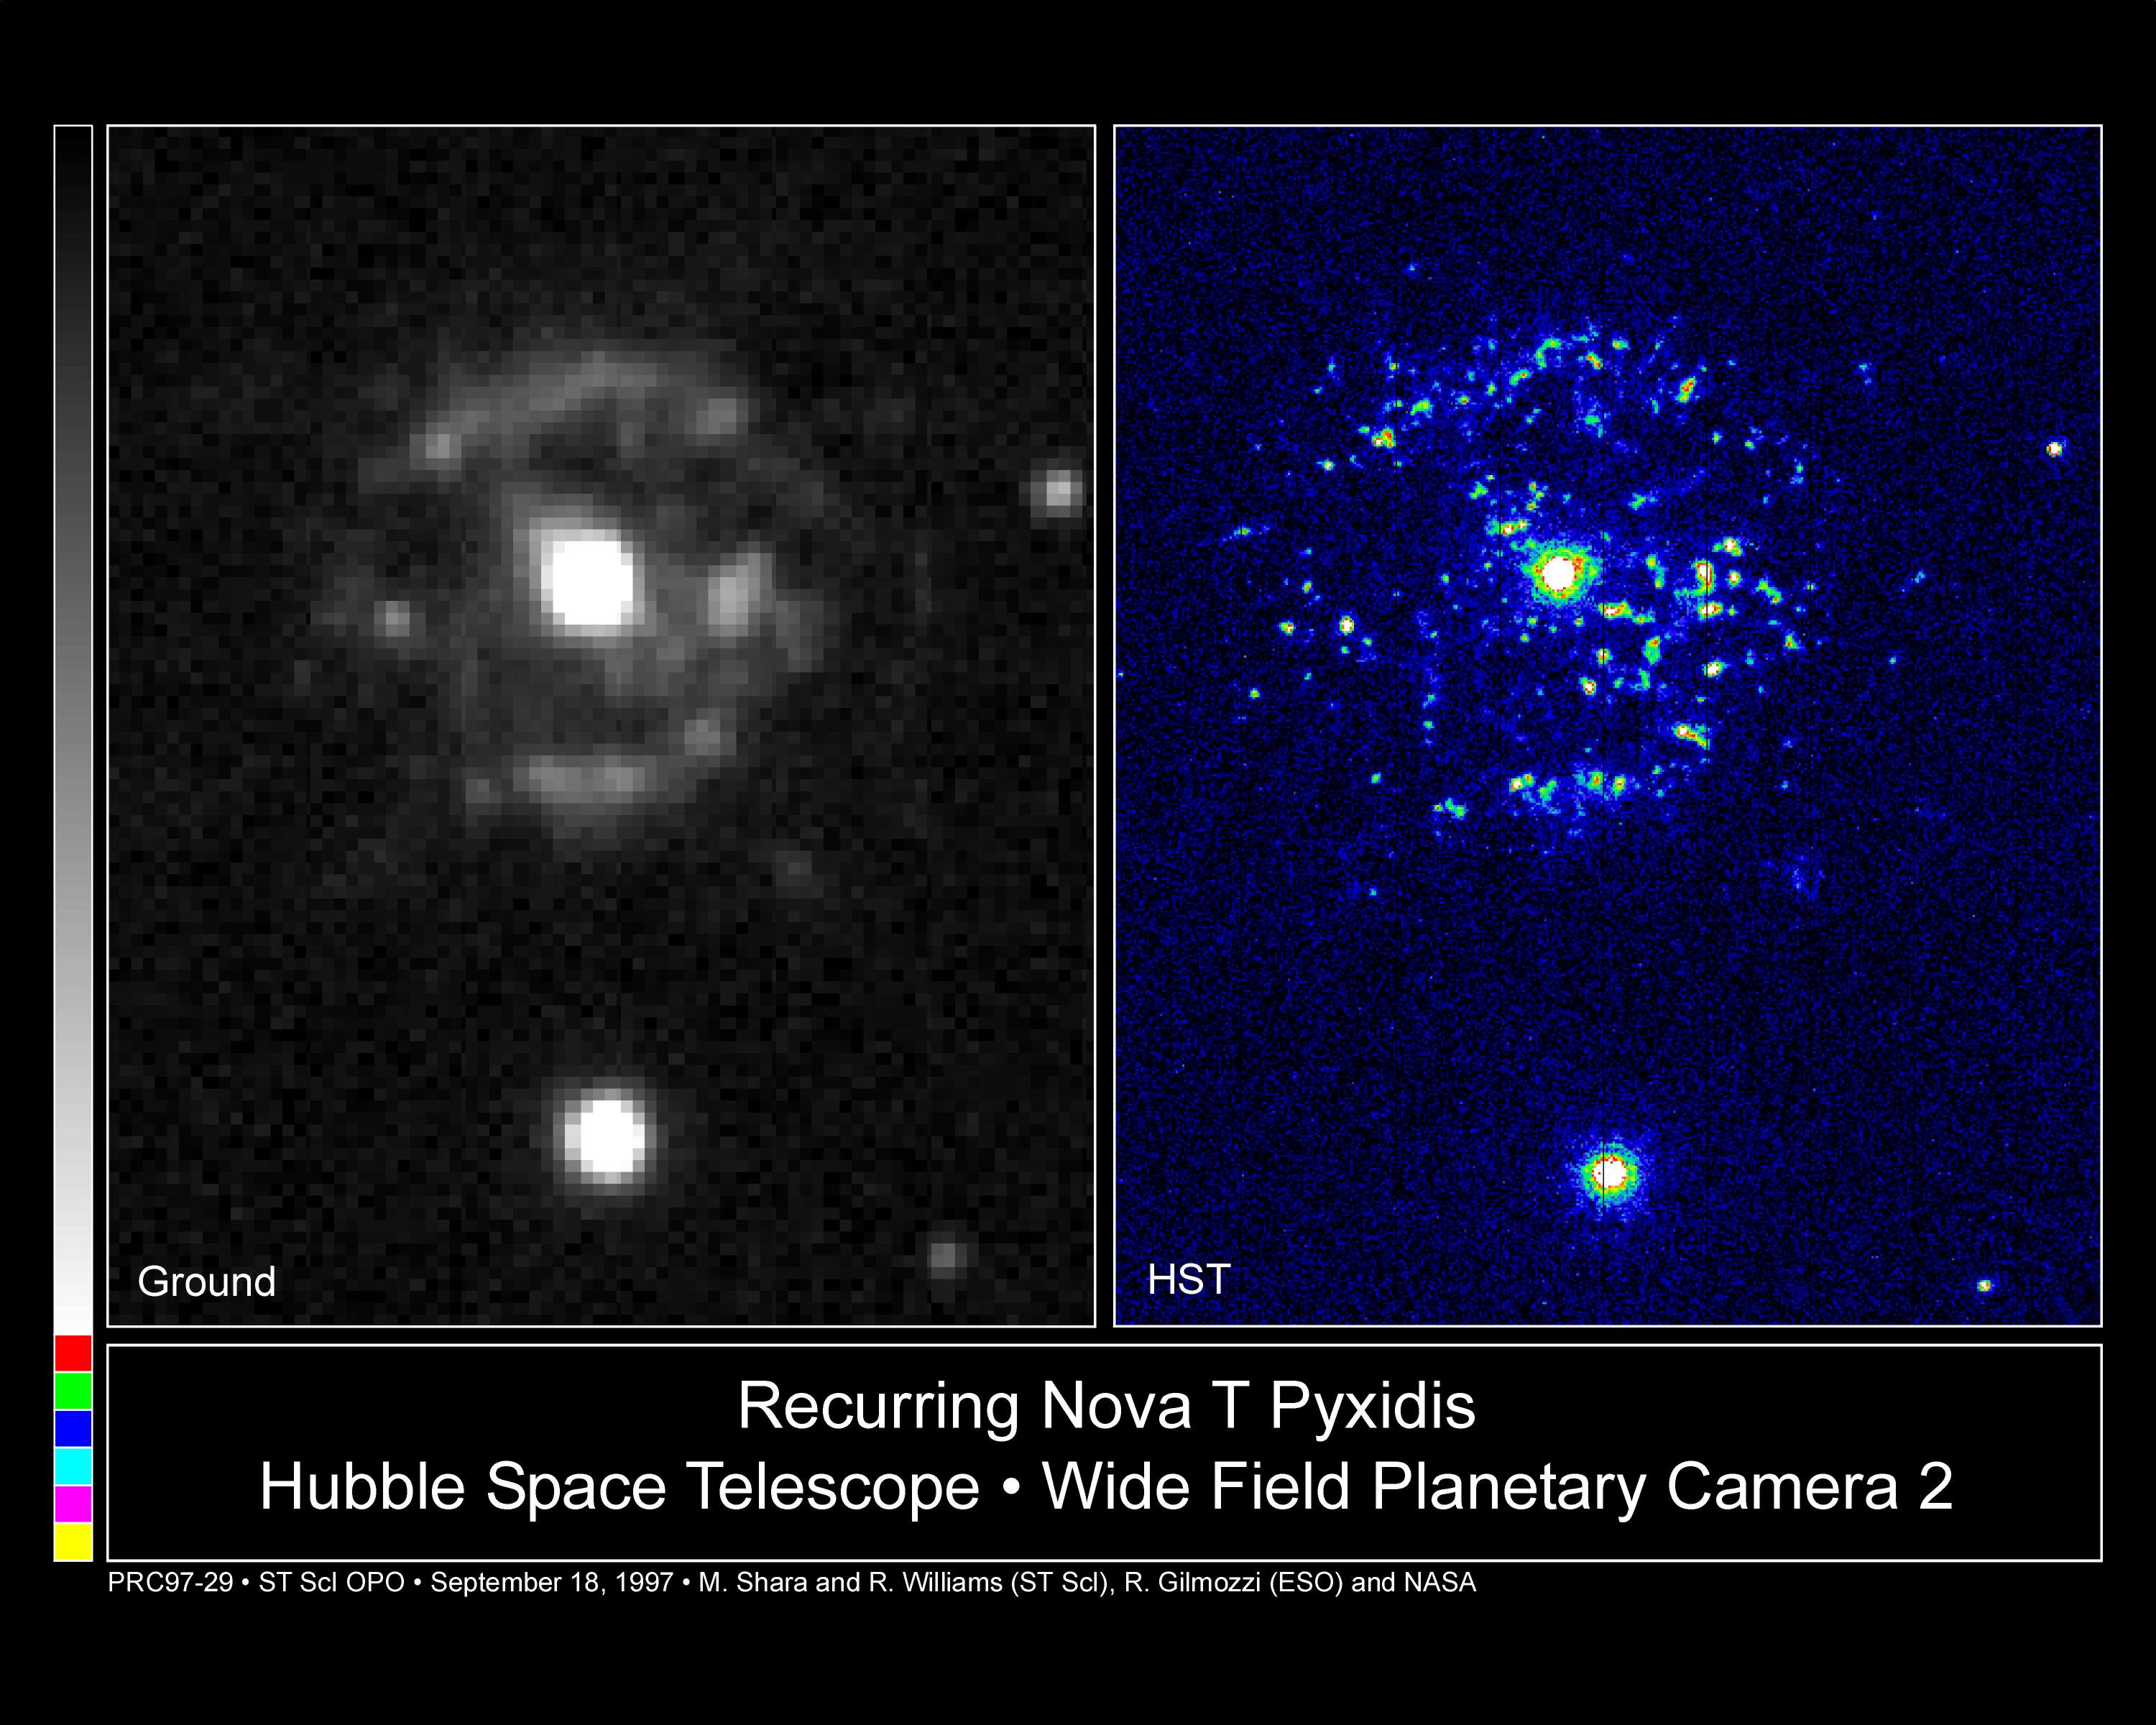

Recurring Nova T Pyxidis

The prolific number of eruptions by the recurrent nova T Pyxidis has attracted the attention of many telescopes.

Credit: Mike Shara, Bob Williams, and David Zurek ( Space Telescope Science Institute); Roberto Gilmozzi (European Southern Observatory); Dina Prialnik (Tel Aviv University); and NASA/ESA